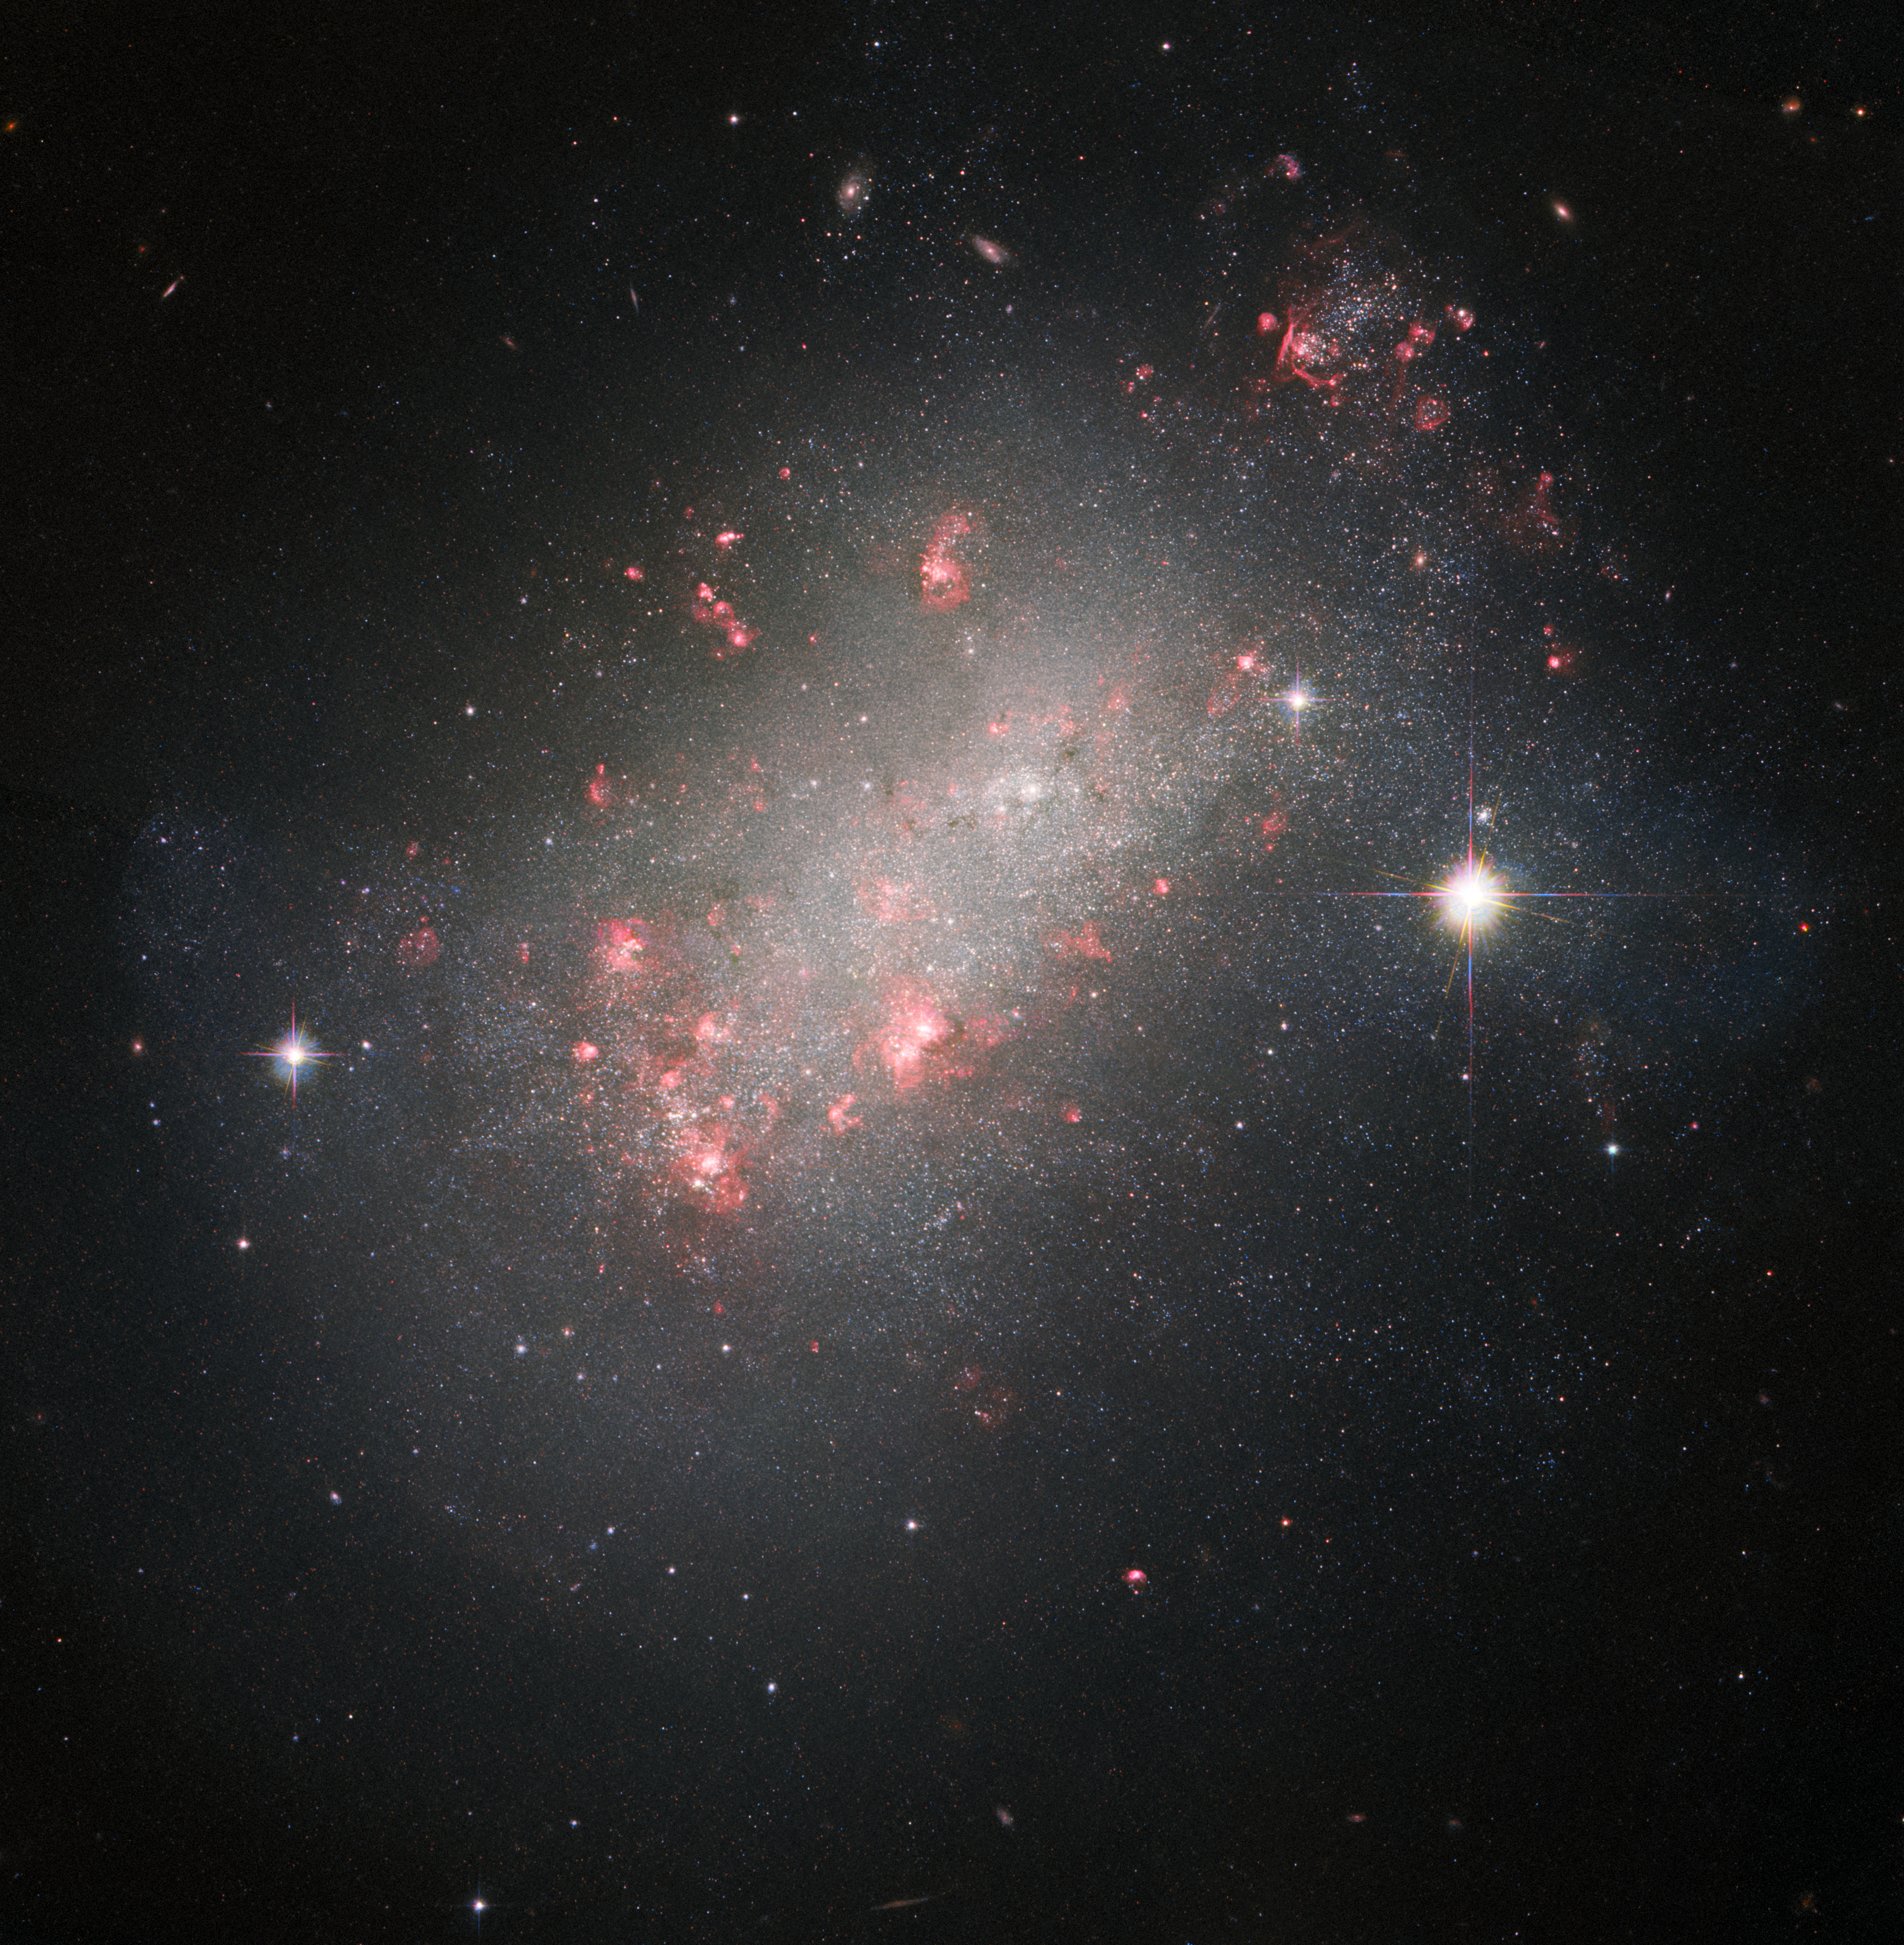

A Marvel of Galactic Morphology

The galaxy featured in this Picture of the Week has a shape unlike many of the galaxies familiar to Hubble. Its thousands of bright stars evoke a spiral galaxy, but it lacks the characteristic ‘winding’ structure. The shining red blossoms stand out as well, twisted by clouds of dust — these are the locations of intense star formation. Yet it also radiates a diffuse glow, much like an elliptical galaxy and its core of older, redder stars. This galactic marvel is known to astronomers as NGC 1156.

NGC 1156 is located around 25 million light-years from Earth, in the constellation Aries. It has a variety of different features that are of interest to astronomers. A dwarf irregular galaxy, it’s also classified as isolated, meaning no other galaxies are nearby enough to influence its odd shape and continuing star formation. The extreme energy of freshly formed young stars gives colour to the galaxy, against the red glow of ionised hydrogen gas, while its centre is densely-packed with older generations of stars.

Hubble has captured NGC 1156 before — this new image features data from a galactic gap-filling programme simply titled “Every Known Nearby Galaxy”. Astronomers noticed that only three quarters of the galaxies within just over 30 million light-years of Earth had been observed by Hubble in sufficient detail to study the makeup of the stars within them. They proposed that in between larger projects, Hubble could take snapshots of the remaining quarter — including NGC 1156. Gap-filling programmes like this one ensure that the best use is made of Hubble’s valuable observing time.

Credit: ESA/Hubble & NASA, R. B. Tully, R. Jansen, R. Windhorst